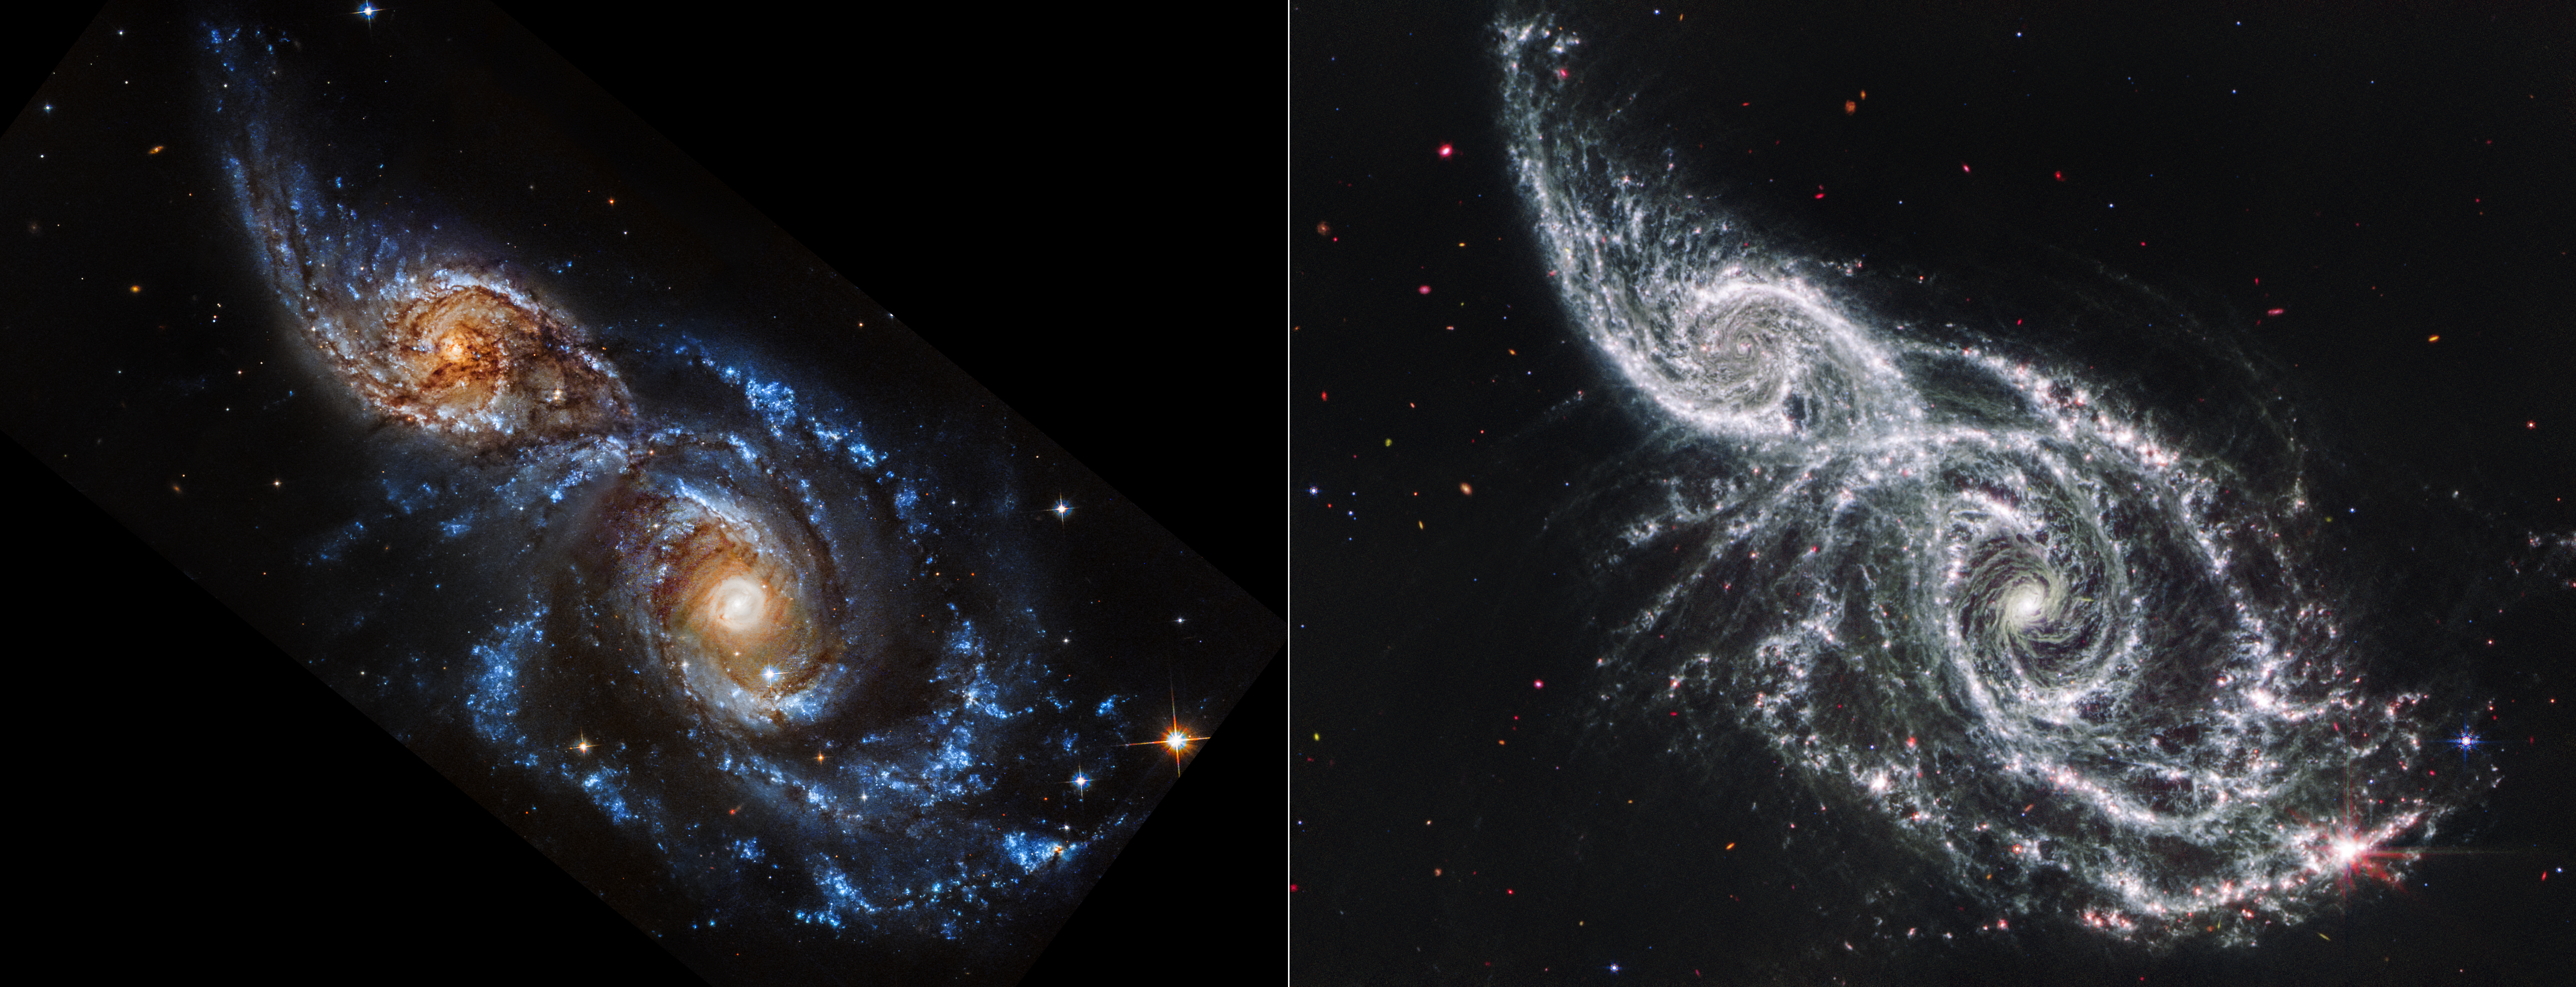

Galaxies IC 2163 and NGC 2207 (Hubble and Webb Images side-by-side)

These are two views of the same scene, each showing two overlapping spiral galaxies, IC 2163 at left and NGC 2207 at right. The NASA/ESA Hubble Space Telescope’s ultraviolet- and visible-light observation is at left, and the NASA/ESA/CSA James Webb Space Telescope’s mid-infrared light observation is at right.

In Hubble’s image, the star-filled spiral arms glow brightly in blue, and the galaxies’ cores in orange. Both galaxies are covered in dark brown dust lanes, which obscure the view of IC 2163’s core at left.

In Webb’s image, cold dust takes centre stage, casting the galaxies’ arms in white. Areas where stars are still deeply embedded in the dust appear pink. Other pink dots may be objects that lie well behind these galaxies, including active supermassive black holes known as quasars.

Turn your eye toward the bottom right of the Webb image. The largest, brightest pink region that glimmers with eight prominent diffraction spikes is a mini starburst — a location where many stars are forming in quick succession. The same region in the Hubble image appears as a bright blue cluster of stars.

The lace-like holes in the white spiral arms of Webb’s images are often where supernovae exploded long ago. In the same regions, Hubble shows these areas are now populated with newer stars.

The black areas to the upper right and lower left of the Hubble image do not contain any data.

Credit: NASA, ESA, CSA, STScI